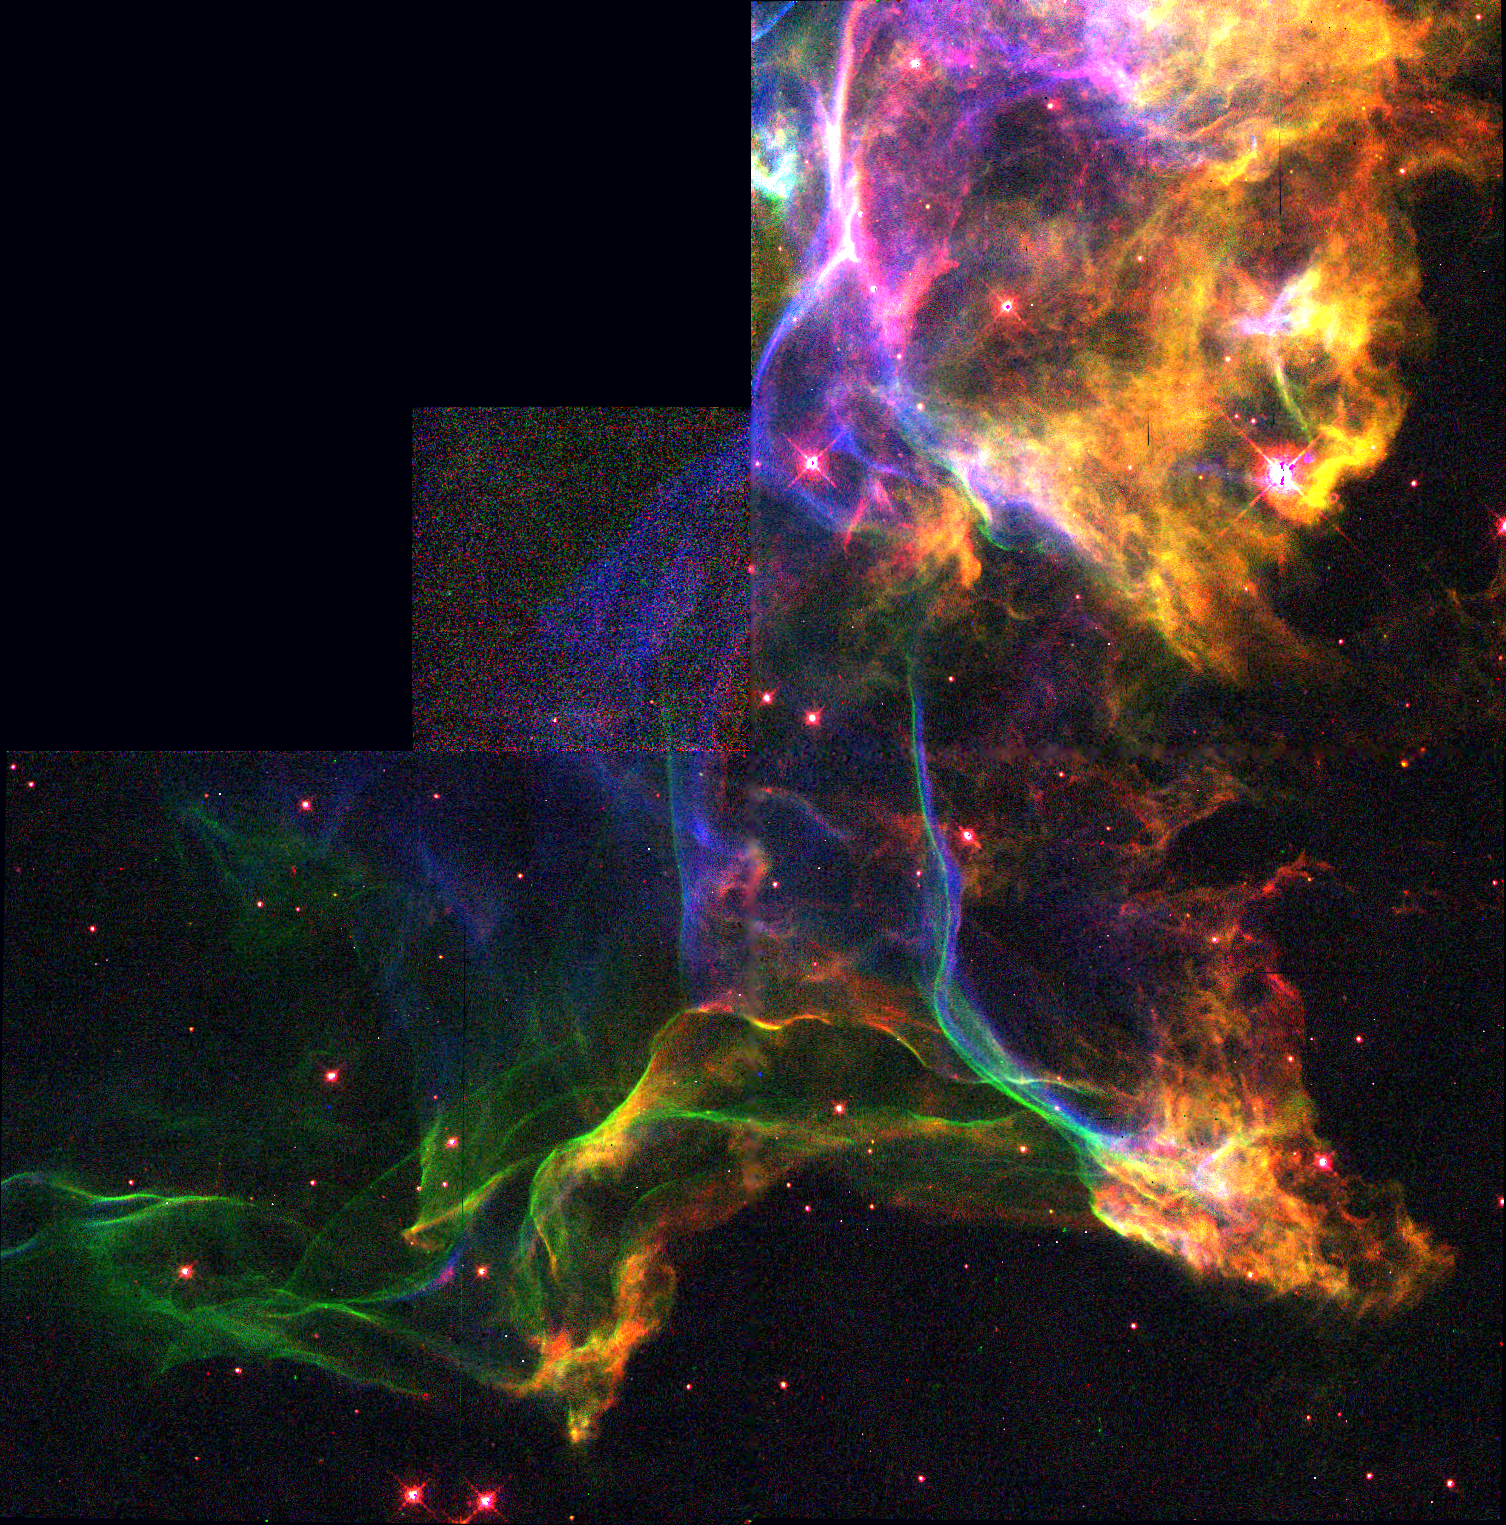

The Cygnus Loop

This image shows a small portion of a nebula called the 'Cygnus Loop.' Covering a region on the sky six times the diameter of the full Moon, the Cygnus Loop is actually the expanding blastwave from a stellar cataclysm - a supernova explosion - which occurred about 15, 000 years ago.

Credit: Jeff Hester (Arizona State University) and NASA/ESA